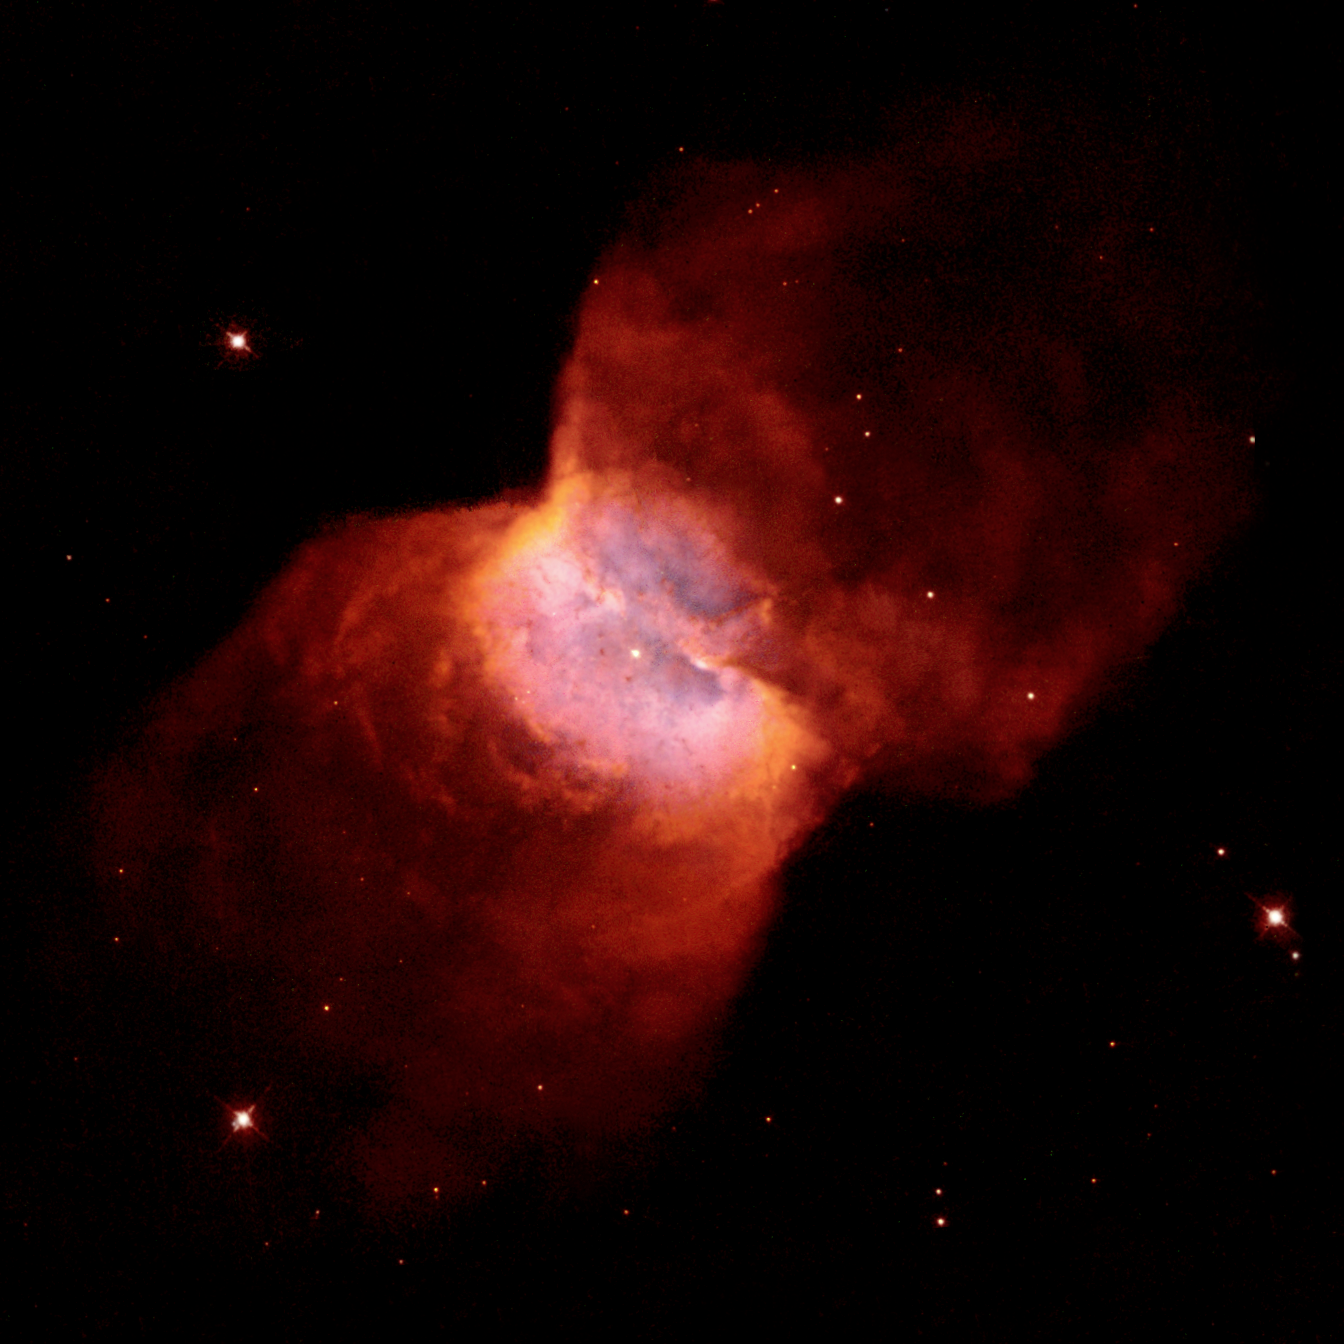

NGC 2346

NGC 2346 is a so-called "planetary nebula," which is ejected from Sun-like stars which are near the ends of their lives. NGC 2346 is remarkable because its central star is known to be actually a very close pair of stars, orbiting each other every 16 days. It is believed that the binary star was originally more widely separated. However, when one component of the binary evolved, expanded in size, and became a red-giant star, it literally swallowed its companion star. The companion star then spiralled downwards inside the red giant, and in the process spewed out gas into aring around the binary system. Later on, when the hot core of the red giant was exposed, it developed a faster stellar wind, which emerged perpendicularly to the ring and inflated two huge "bubbles". This two-stage process is believed to have resulted in the butterfly-like shape of the nebula. NGC 2346 lies about 2,000 light-years away from us, and is about one-third of a light-year in size.

Credit: NASA/ESA and The Hubble Heritage Team (AURA/STScI).